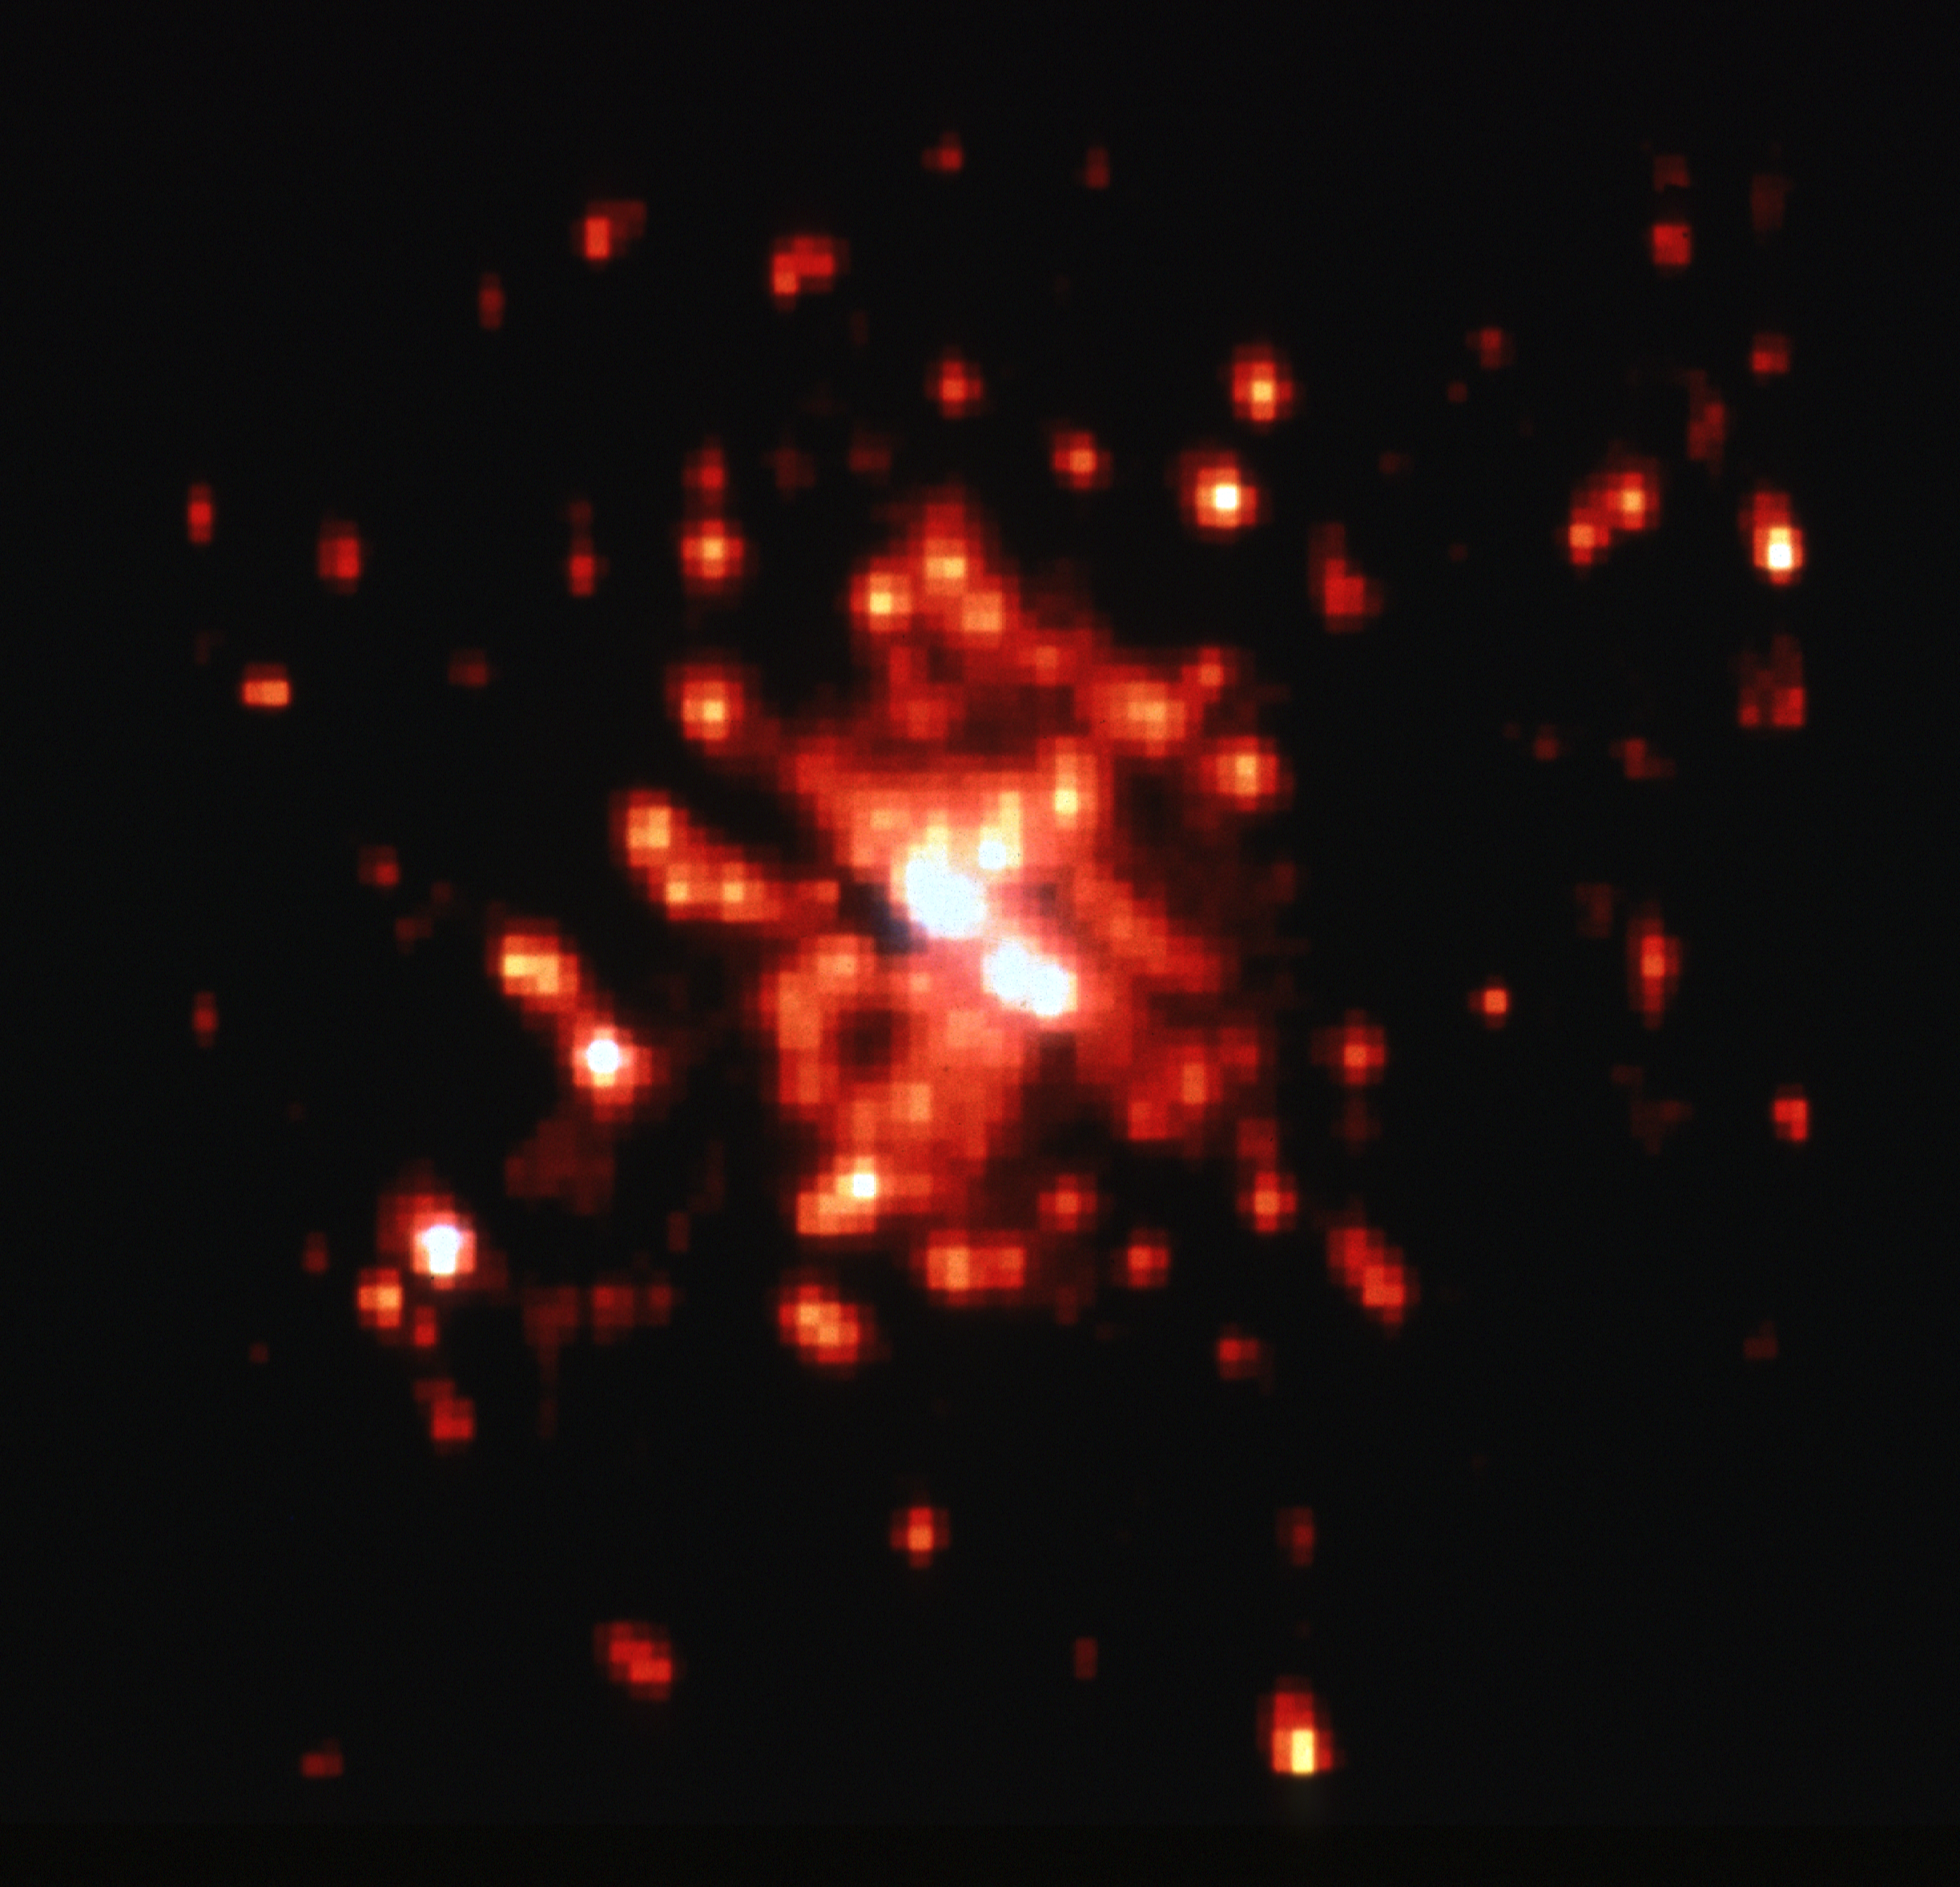

Star cluster R136 - wide field and planetary camera

Computer processing of the HST image sharpens the appearance of the cluster by subtracting stellar halos introduced by spherical aberration in the HST optics.

Credit: NASA/ESA